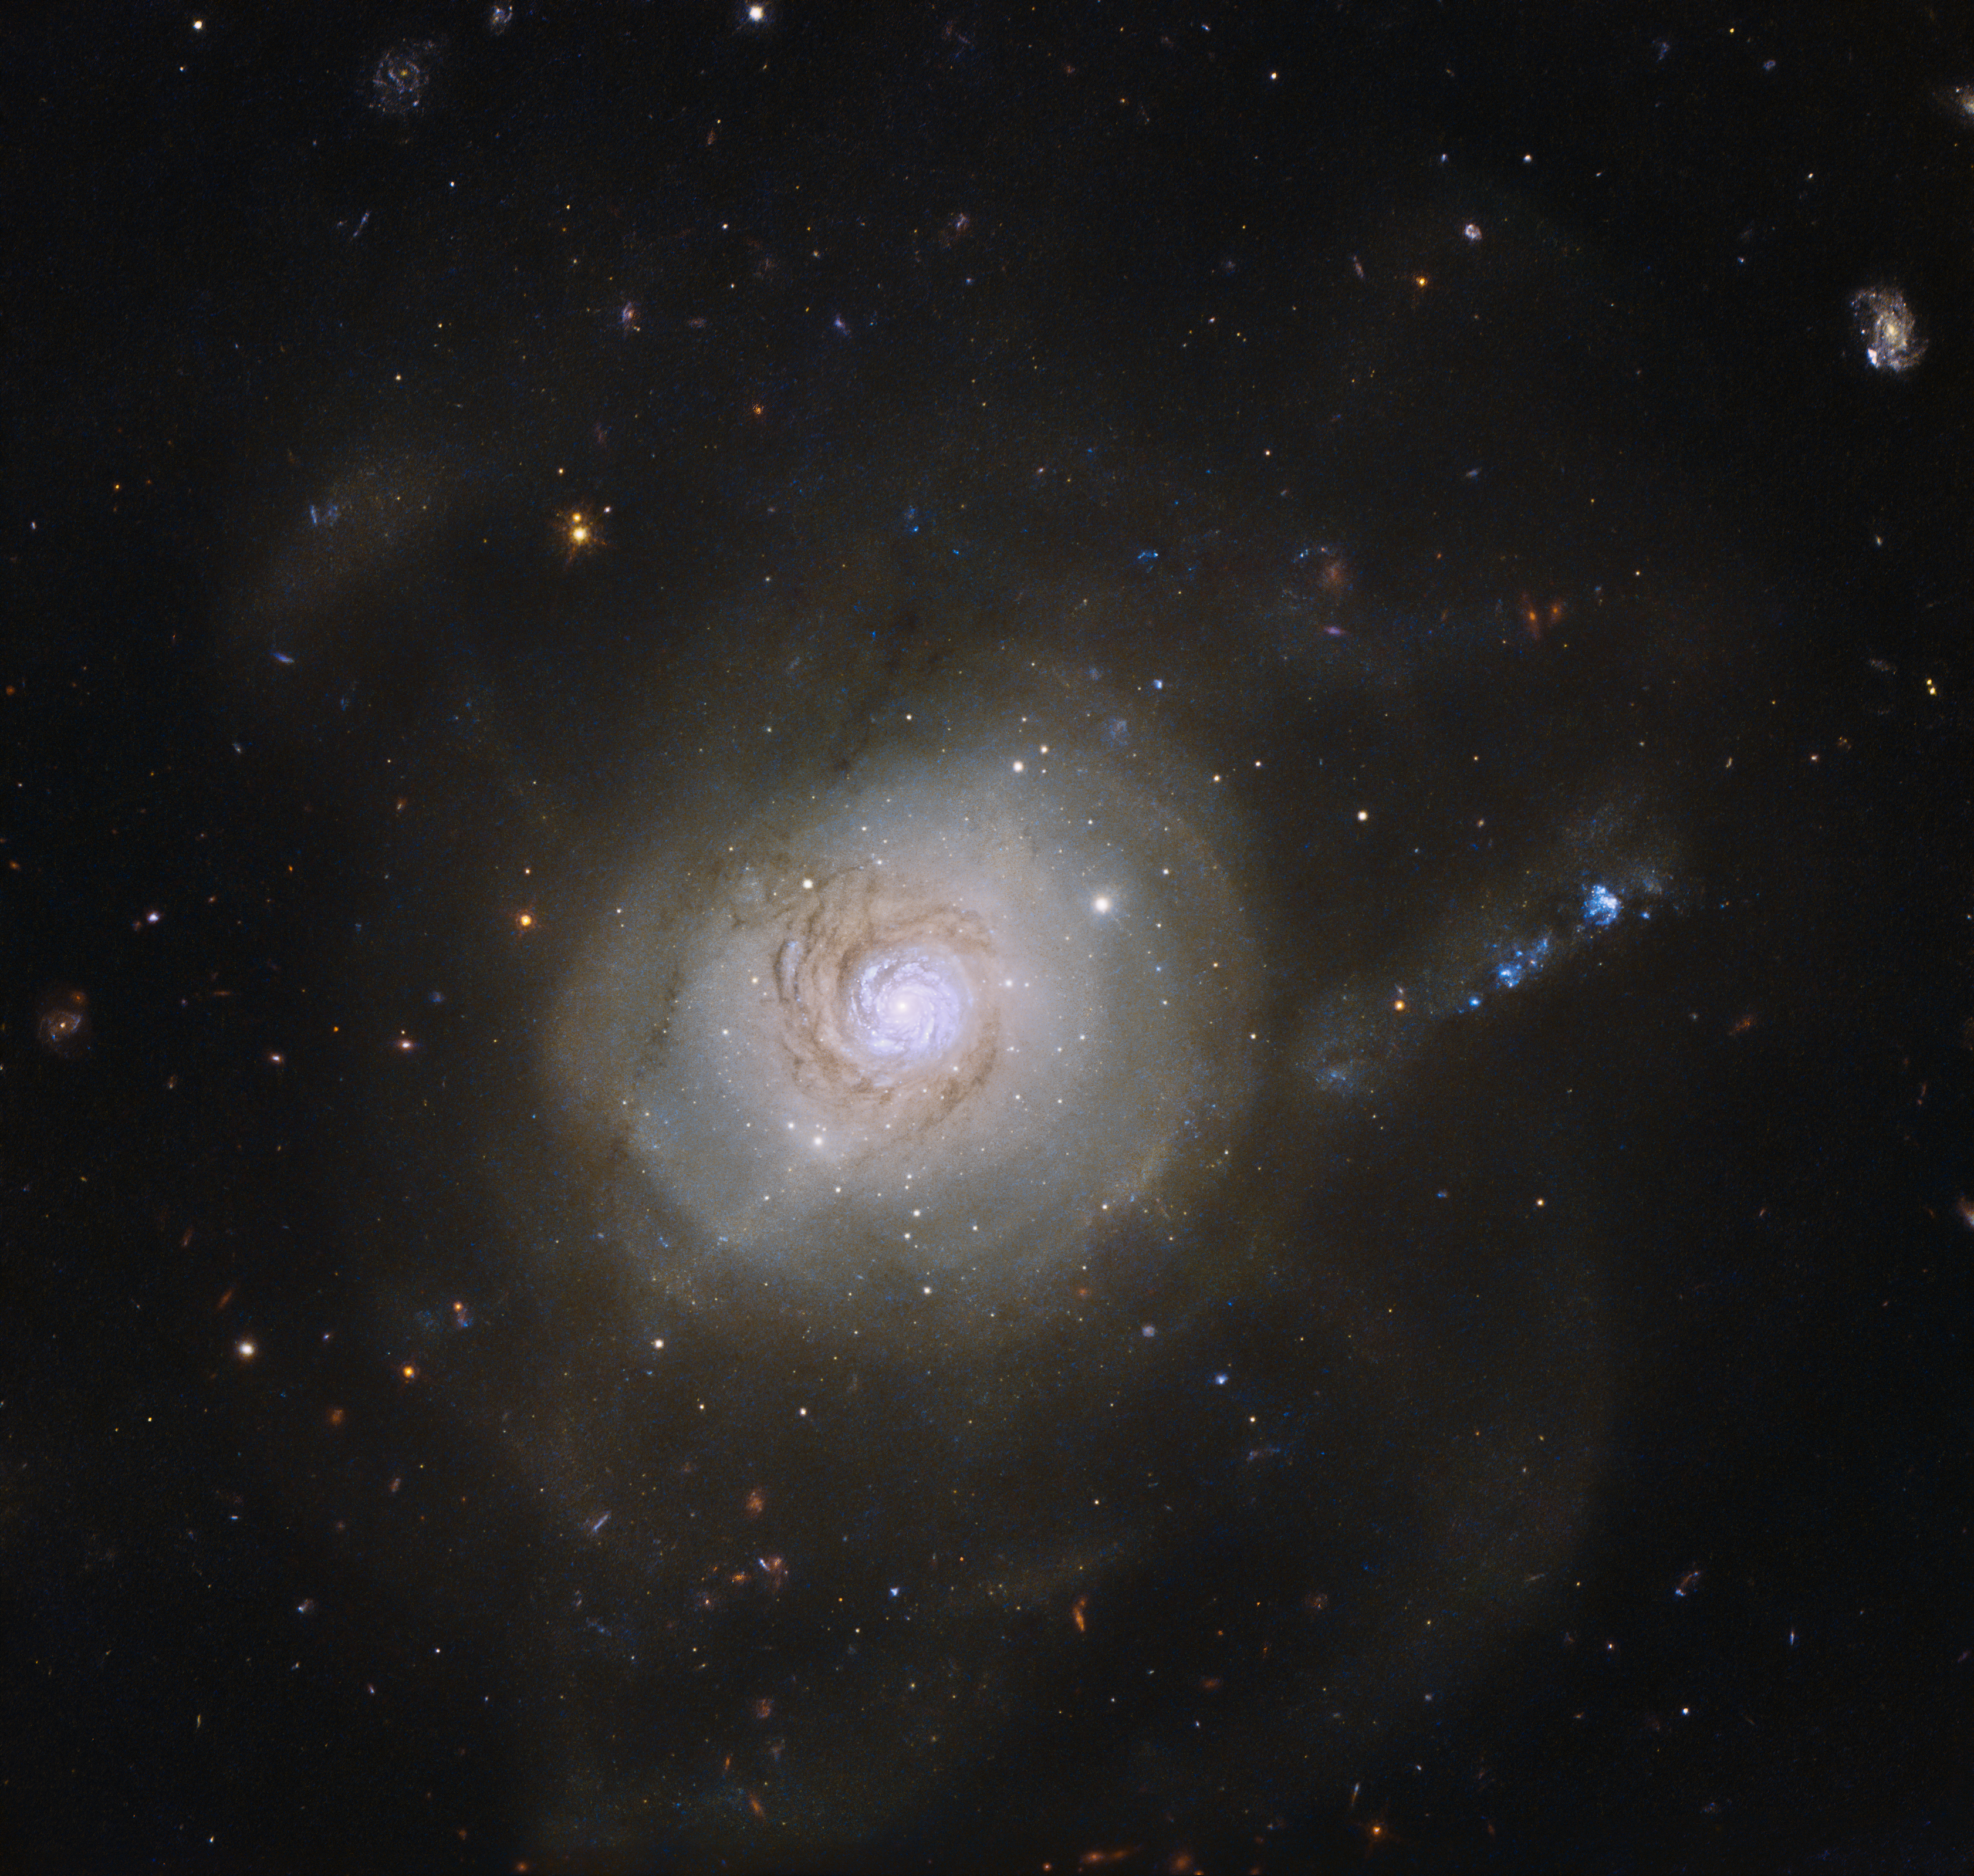

Galactic politics

Only rarely does an astronomical object have a political association. However, the spiral galaxy NGC 7252 acquired exactly that when it was given an unusual nickname.

In December 1953, the US President Dwight D. Eisenhower gave a speech advocating the use of nuclear power for peaceful purposes. This “Atoms for Peace” speech was significant for the scientific community, as it brought nuclear research into the public domain, and NGC 7252, which has a superficial resemblance to an atomic nucleus surrounded by the loops of electronic orbits, was dubbed the Atoms for Peace galaxy in honour of this. These loops are well visible in a wider field of view image.

This nickname is quite ironic, as the galaxy’s past was anything but peaceful. Its peculiar appearance is the result of a collision between two galaxies that took place about a billion years ago, which ripped both galaxies apart. The loop-like outer structures, likely made up of dust and stars flung outwards by the crash, but recalling orbiting electrons in an atom, are partly responsible for the galaxy’s nickname.

This NASA/ESA Hubble Space Telescope image shows the inner parts of the galaxy, revealing a pinwheel-shaped disc that is rotating in a direction opposite to the rest of the galaxy. This disc resembles a spiral galaxy like our own galaxy, the Milky Way, but is only about 10 000 light-years across — about a tenth of the size of the Milky Way. It is believed that this whirling structure is a remnant of the galactic collision. It will most likely have vanished in a few billion years’ time, when NGC 7252 will have completed its merging process.

Credit: NASA & ESA, Acknowledgements: Judy Schmidt (Geckzilla)